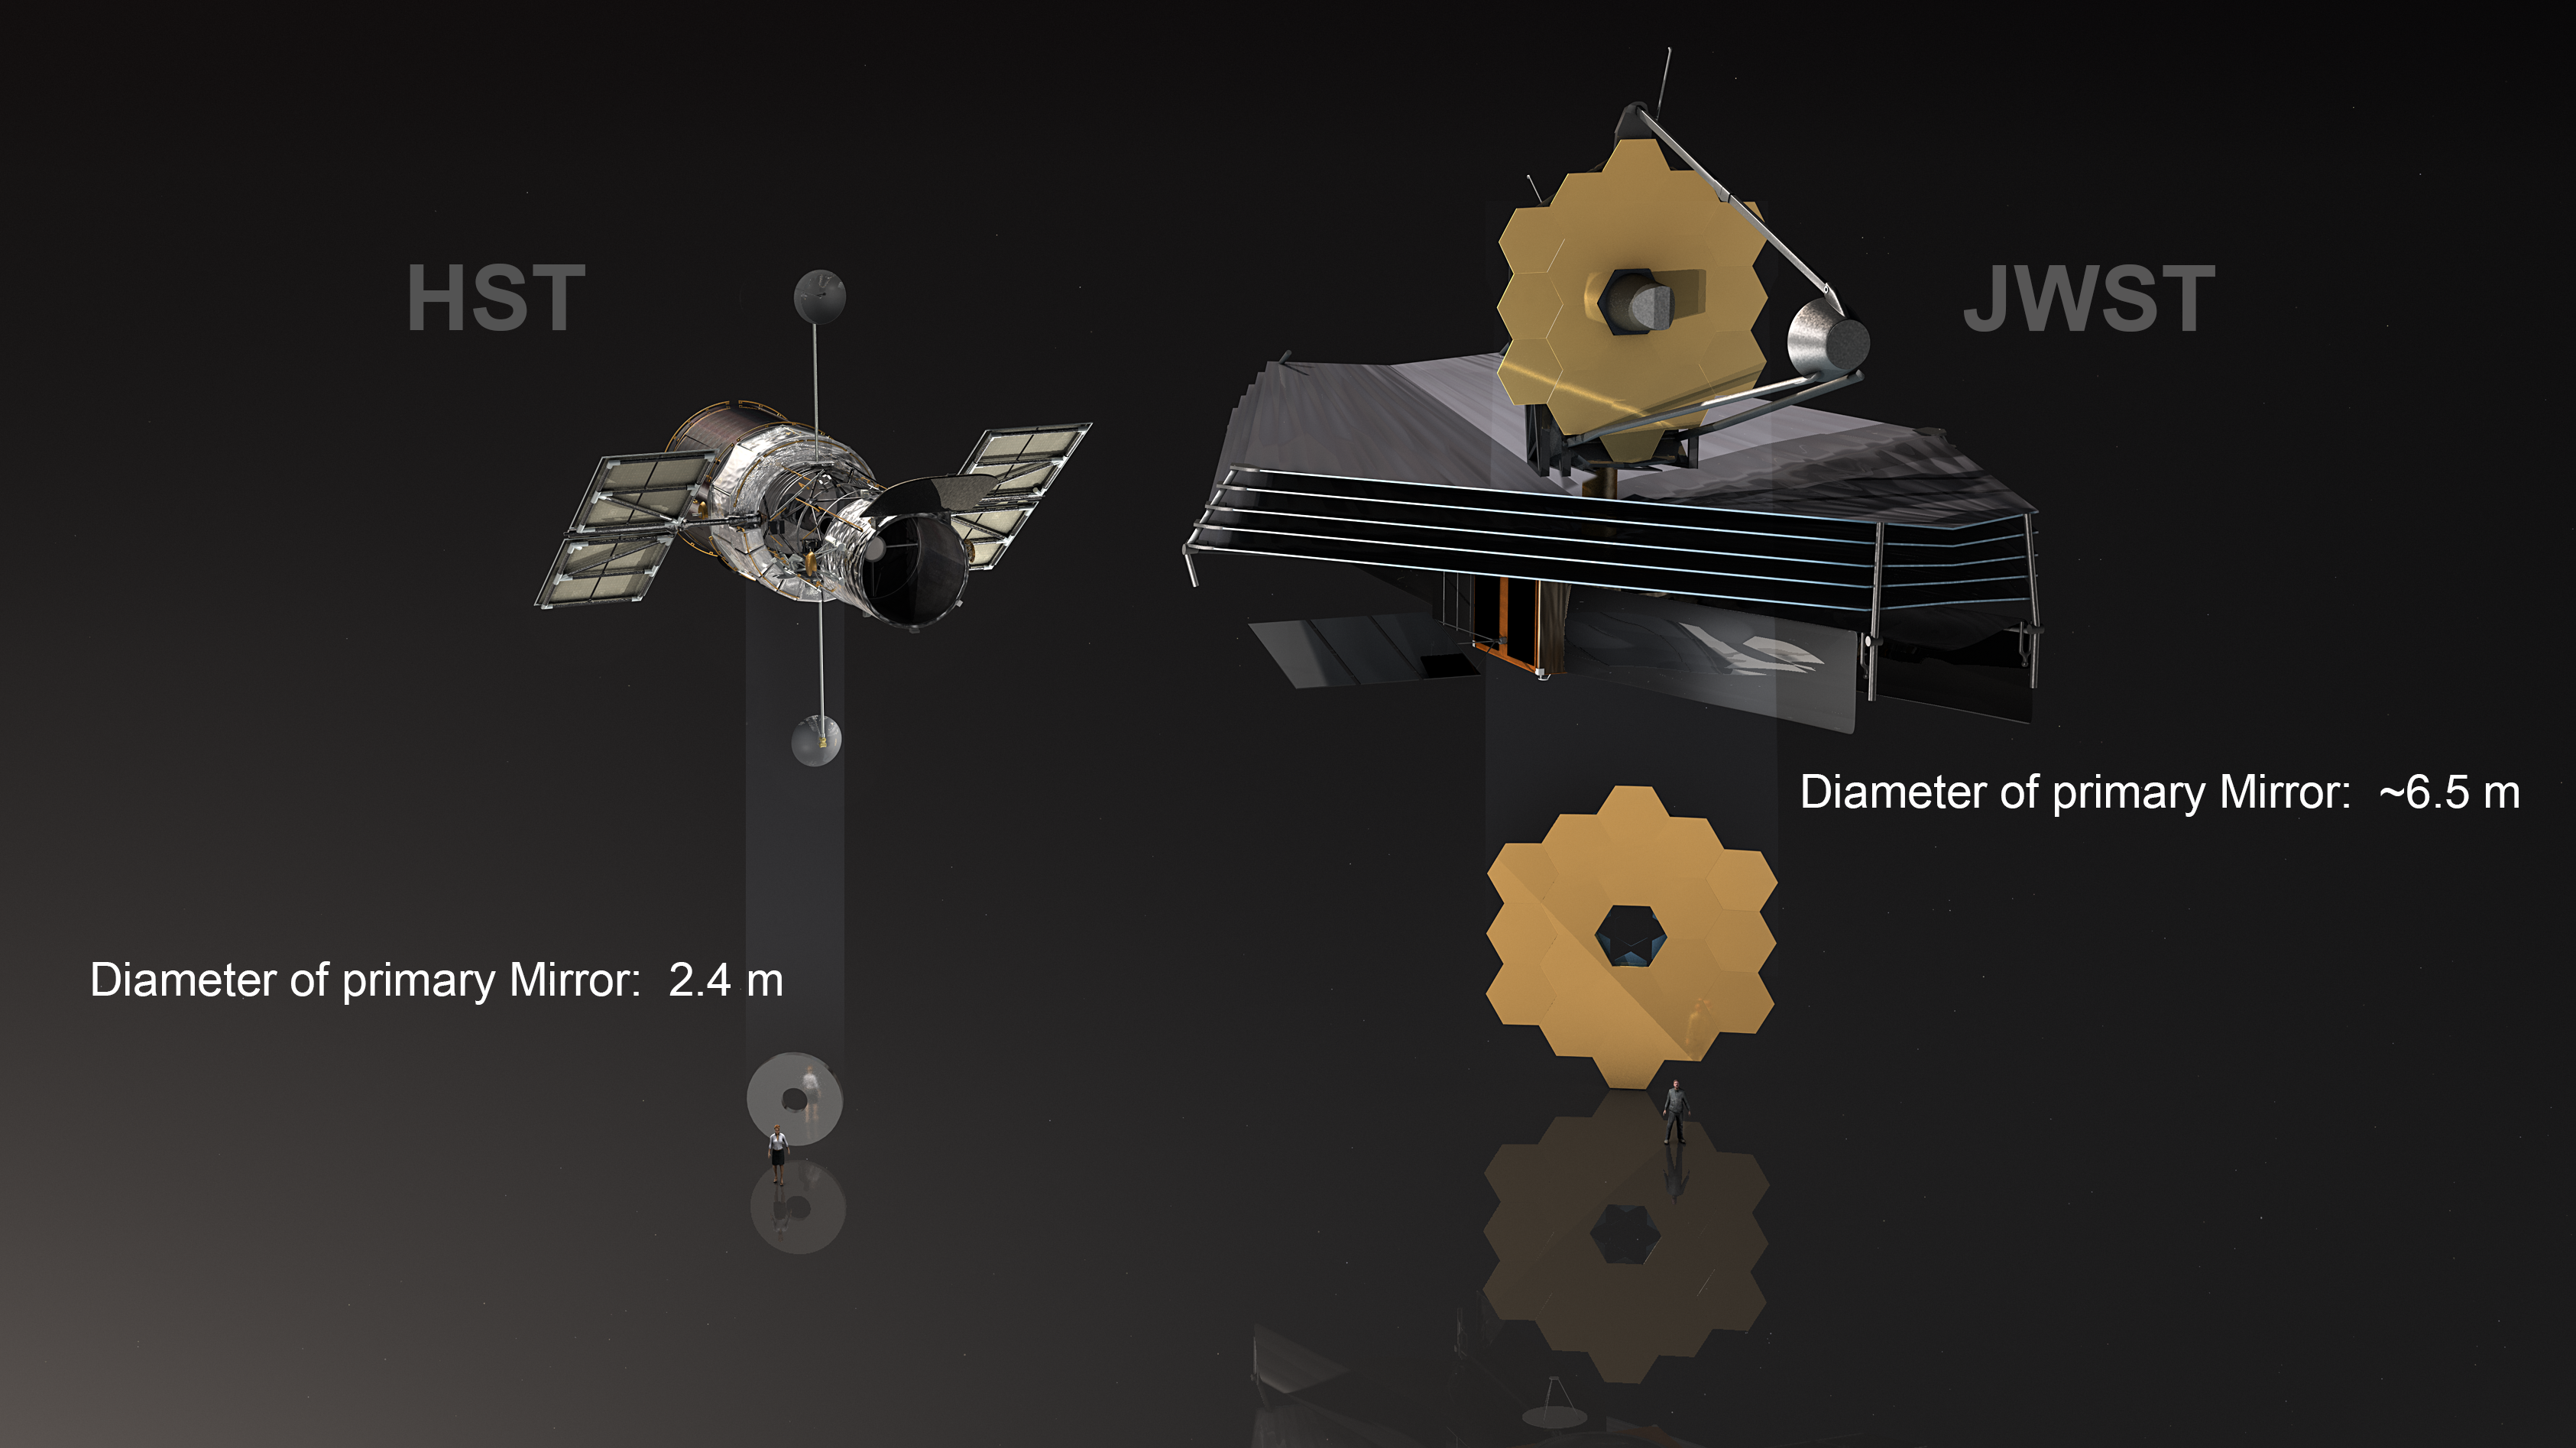

Comparison of Hubble and James Webb mirror (annotated)

This illustration shows both the NASA/ESA Hubble Space Telescope and the NASA/ESA/CSA James Webb Space Telescope and compares their respective mirrors. The main mirror of Hubble has a diameter of 2.4 metres, the foldable main mirror of James Webb is even 6.5 metres in diameter.

Credit: ESA/M. Kornmesser